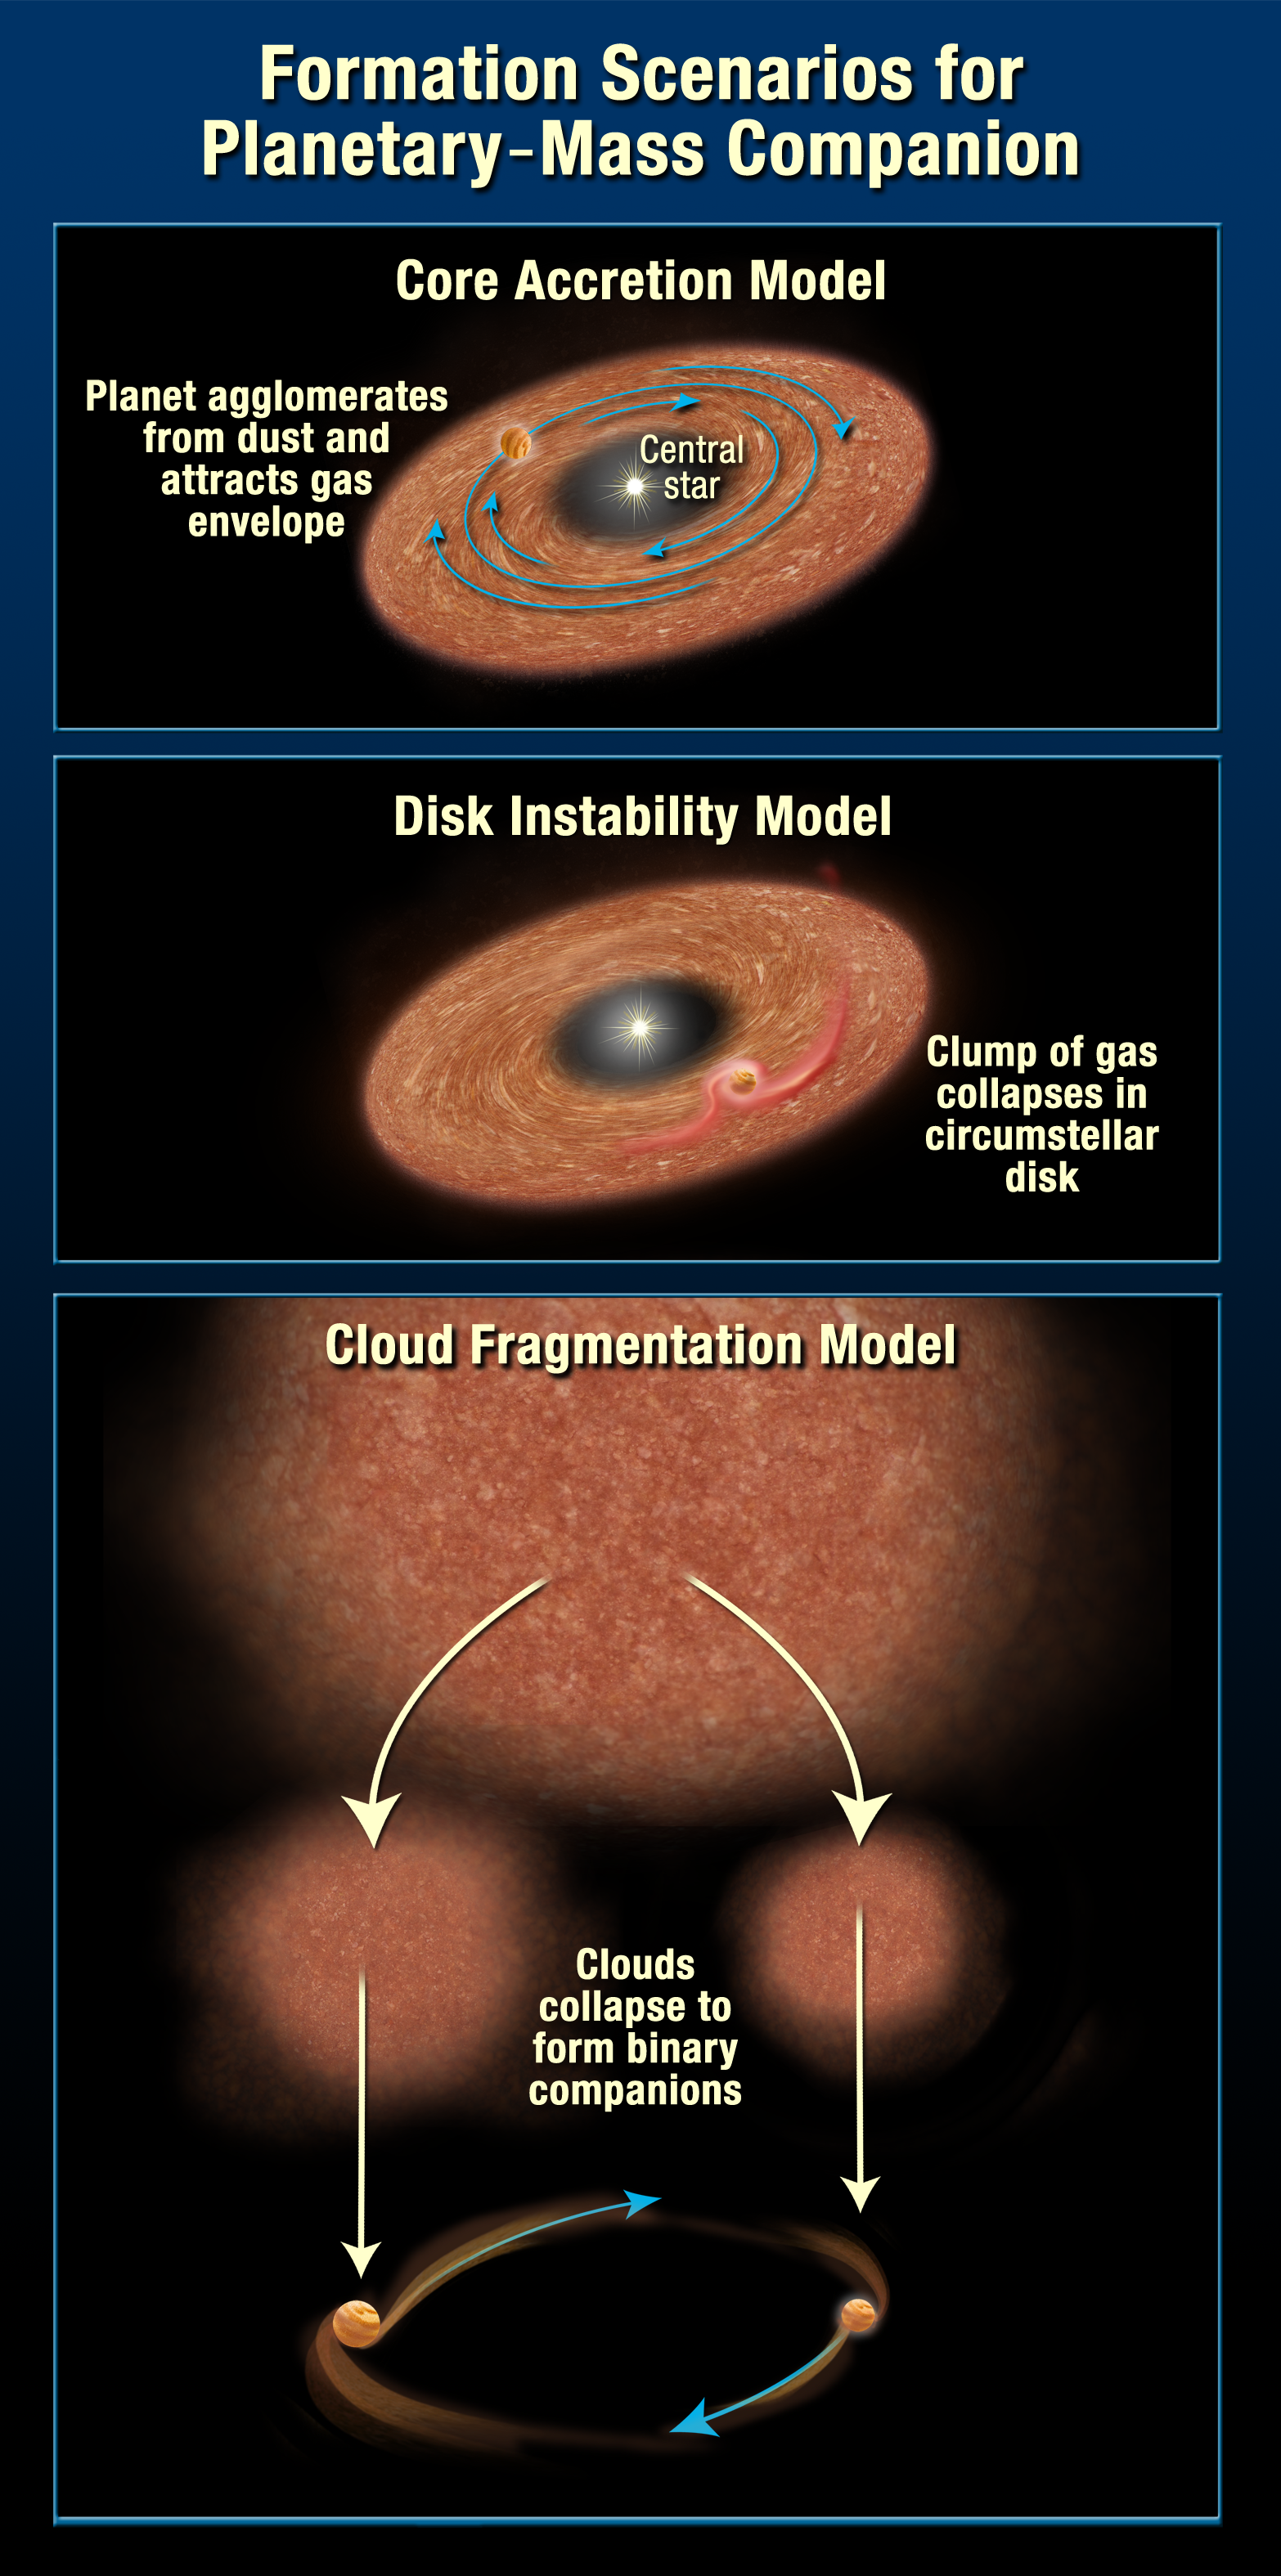

Formation scenarios for planetary-mass companion (artist's impression)

Formation scenarios for planetary-mass companion.

Credit: NASA, ESA and A. Feild (STScI)